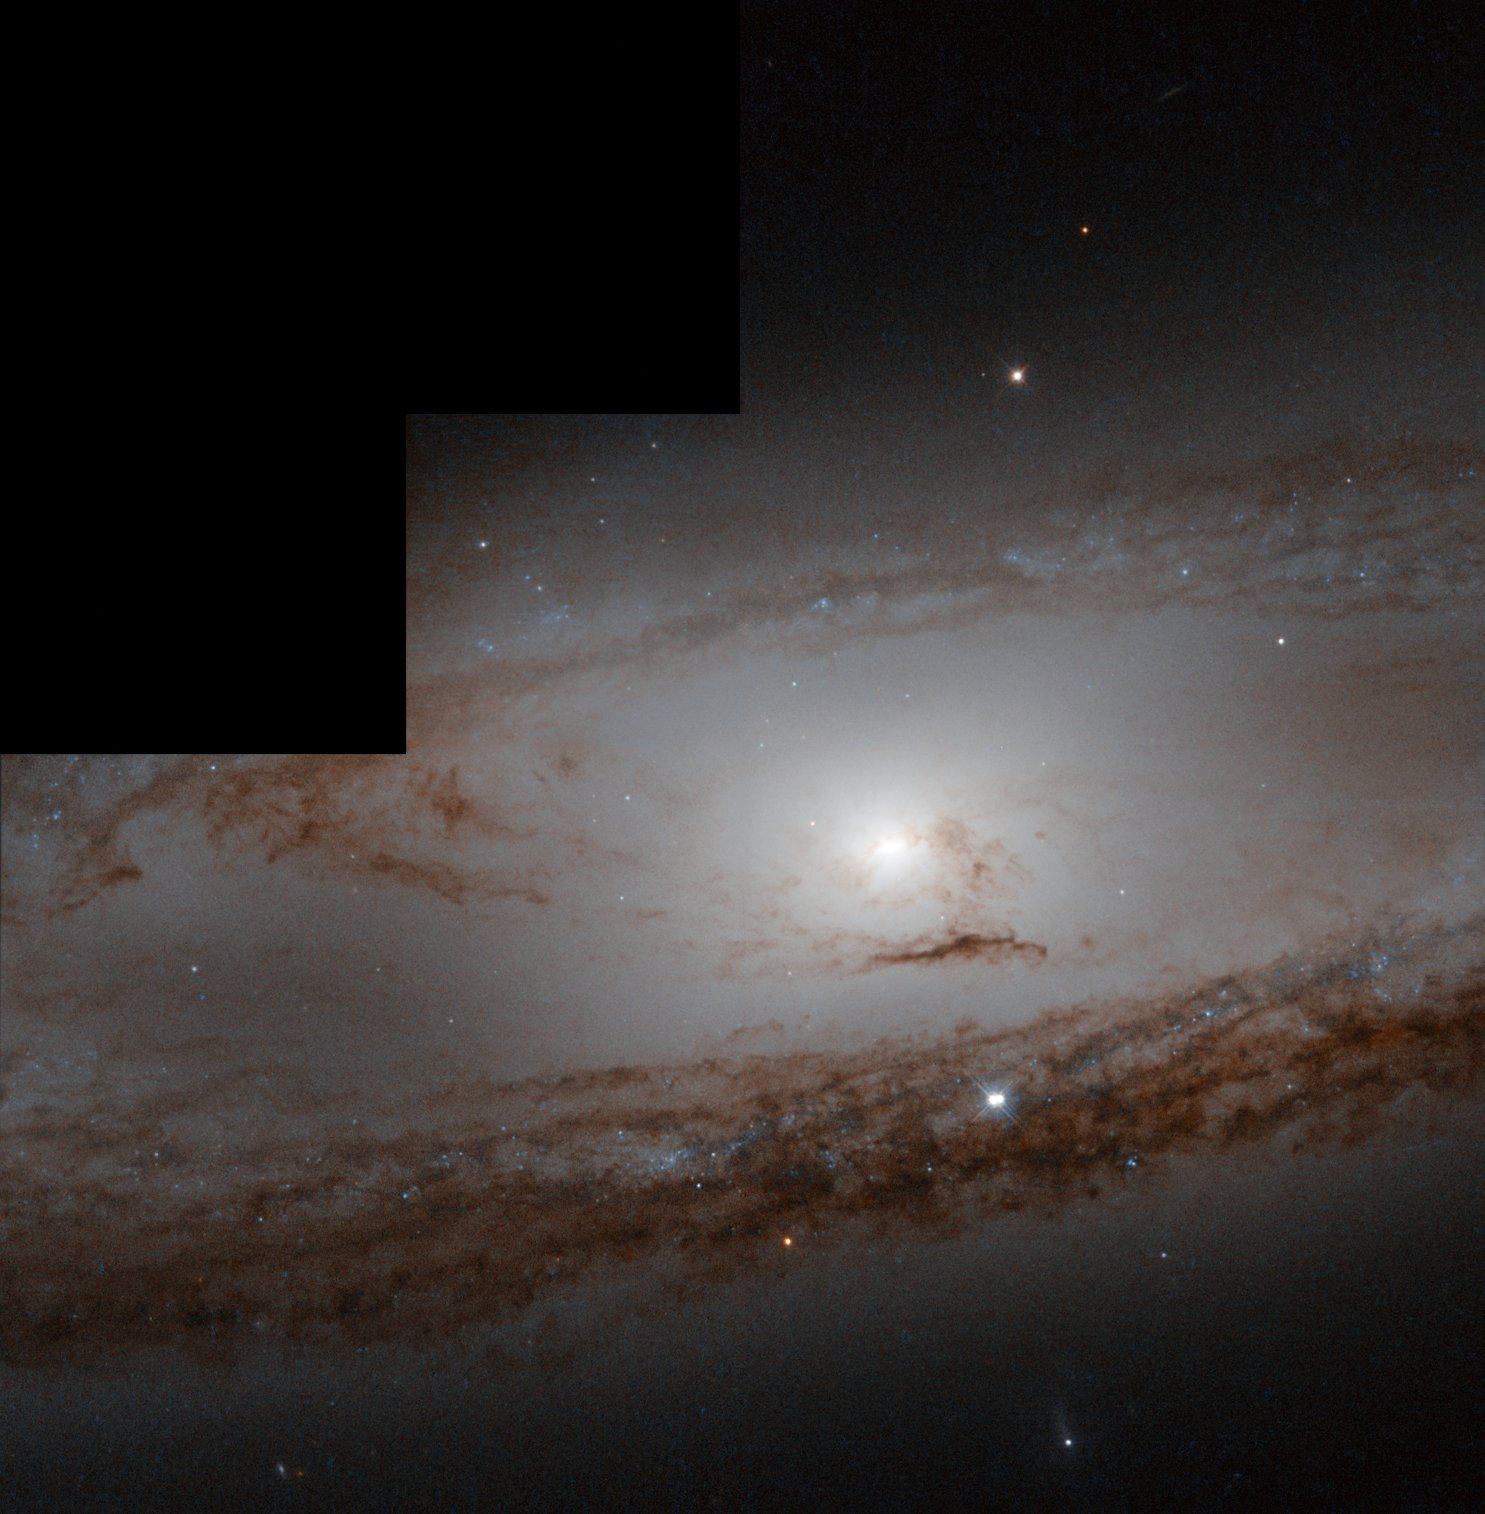

Messier 65 through the years

The 1st of March 1780 was a particularly productive night for Charles Messier. Combing the constellation of Leo for additions to his grand astronomical catalogue, he struck on not one, but two, new objects.

One of those objects is seen here: Messier 65. "Nebula discovered in Leo: It is very faint and contains no star," he jotted down in his notebook. But he was wrong — as we now know, Messier 65 is a spiral galaxy containing billions upon billions of stars.

All Messier saw was a faint diffuse light, nothing like the fine detail here, so we can forgive his mistake. If he had had access to a telescope like Hubble, he could have spied these stunning, tightly wound purple spiral arms and dark dust lanes, encircling a bright centre crammed with stars.

Almost exactly 233 years later in March of this year, one of the stars within Messier 65 went supernova (not seen in this image), rivalling the rest of the entire galaxy in brightness. This, the first Messier supernova of 2013, is now fading, and the serene beauty of M65 is returning.

Credit: ESA/Hubble & NASA